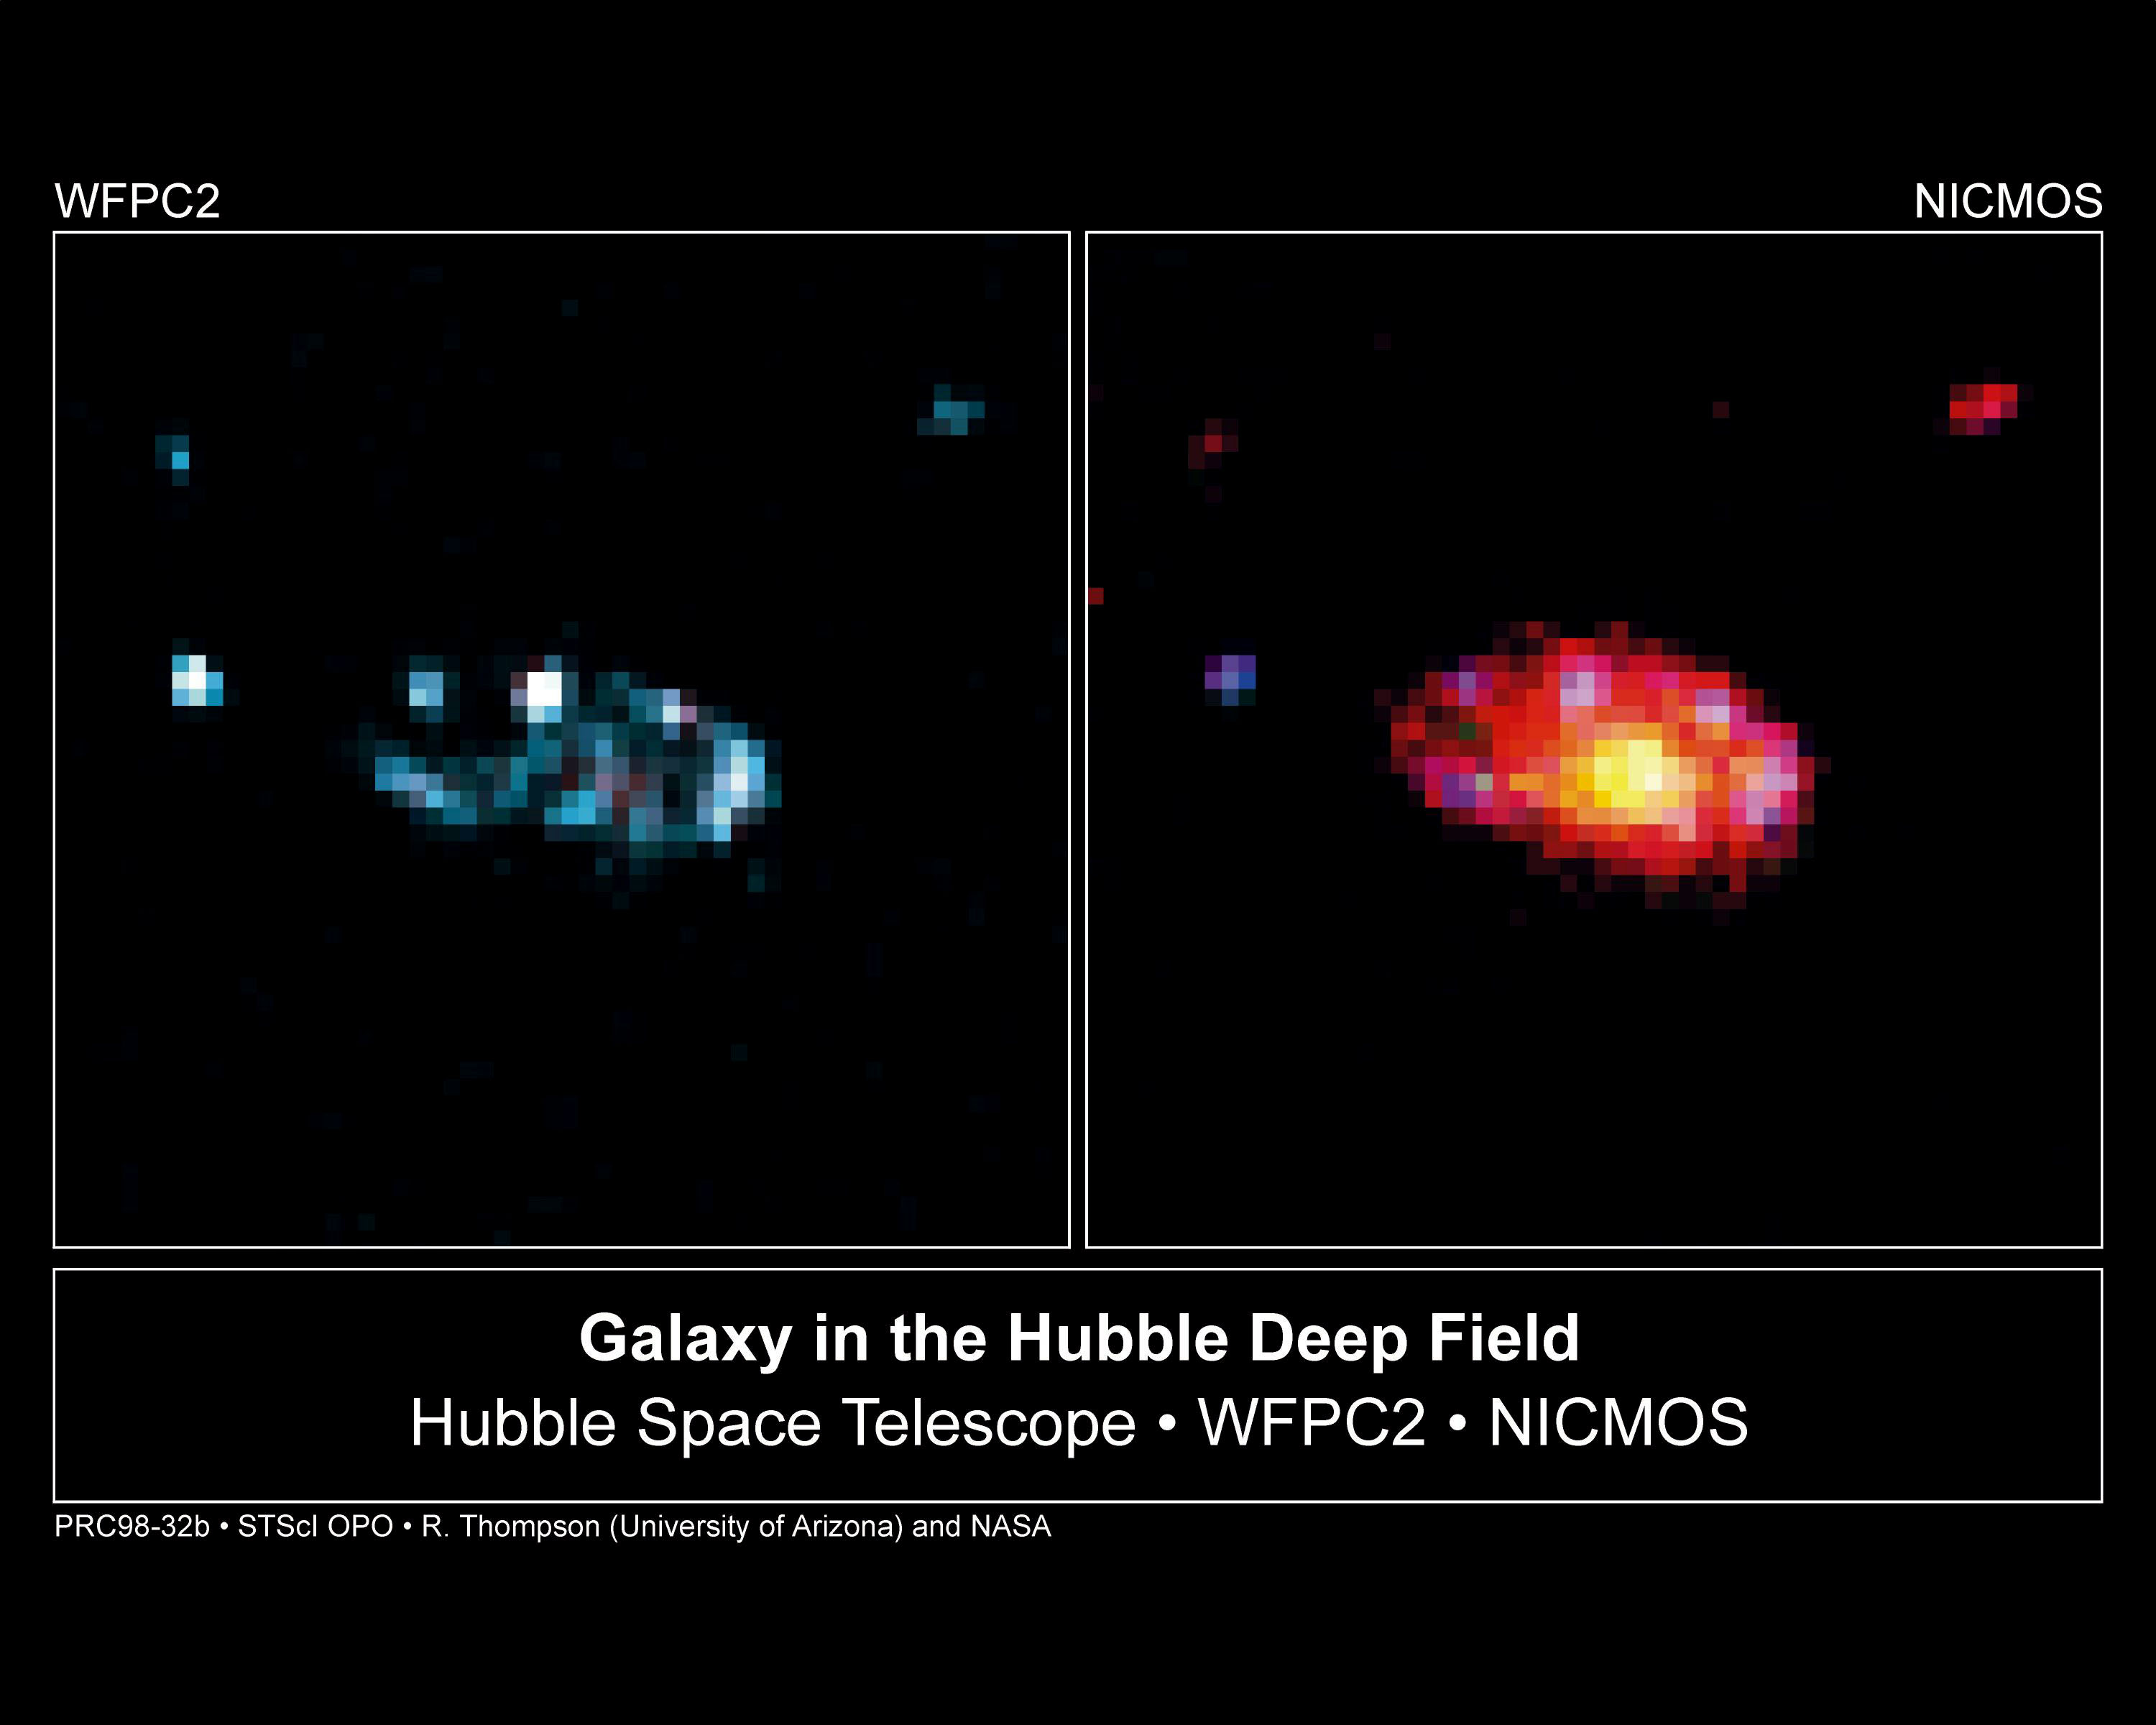

Comparative view of galaxy's Ssellar populations

A galaxy can look quite different in visible vs infrared light. This is a comparison view of a spiral galaxy in the Hubble Deep Field -- Hubble Space Telescope's view of the faintest galaxies ever seen in the universe.

Credit: Rodger I. Thompson (University of Arizona), and NASA/ESA